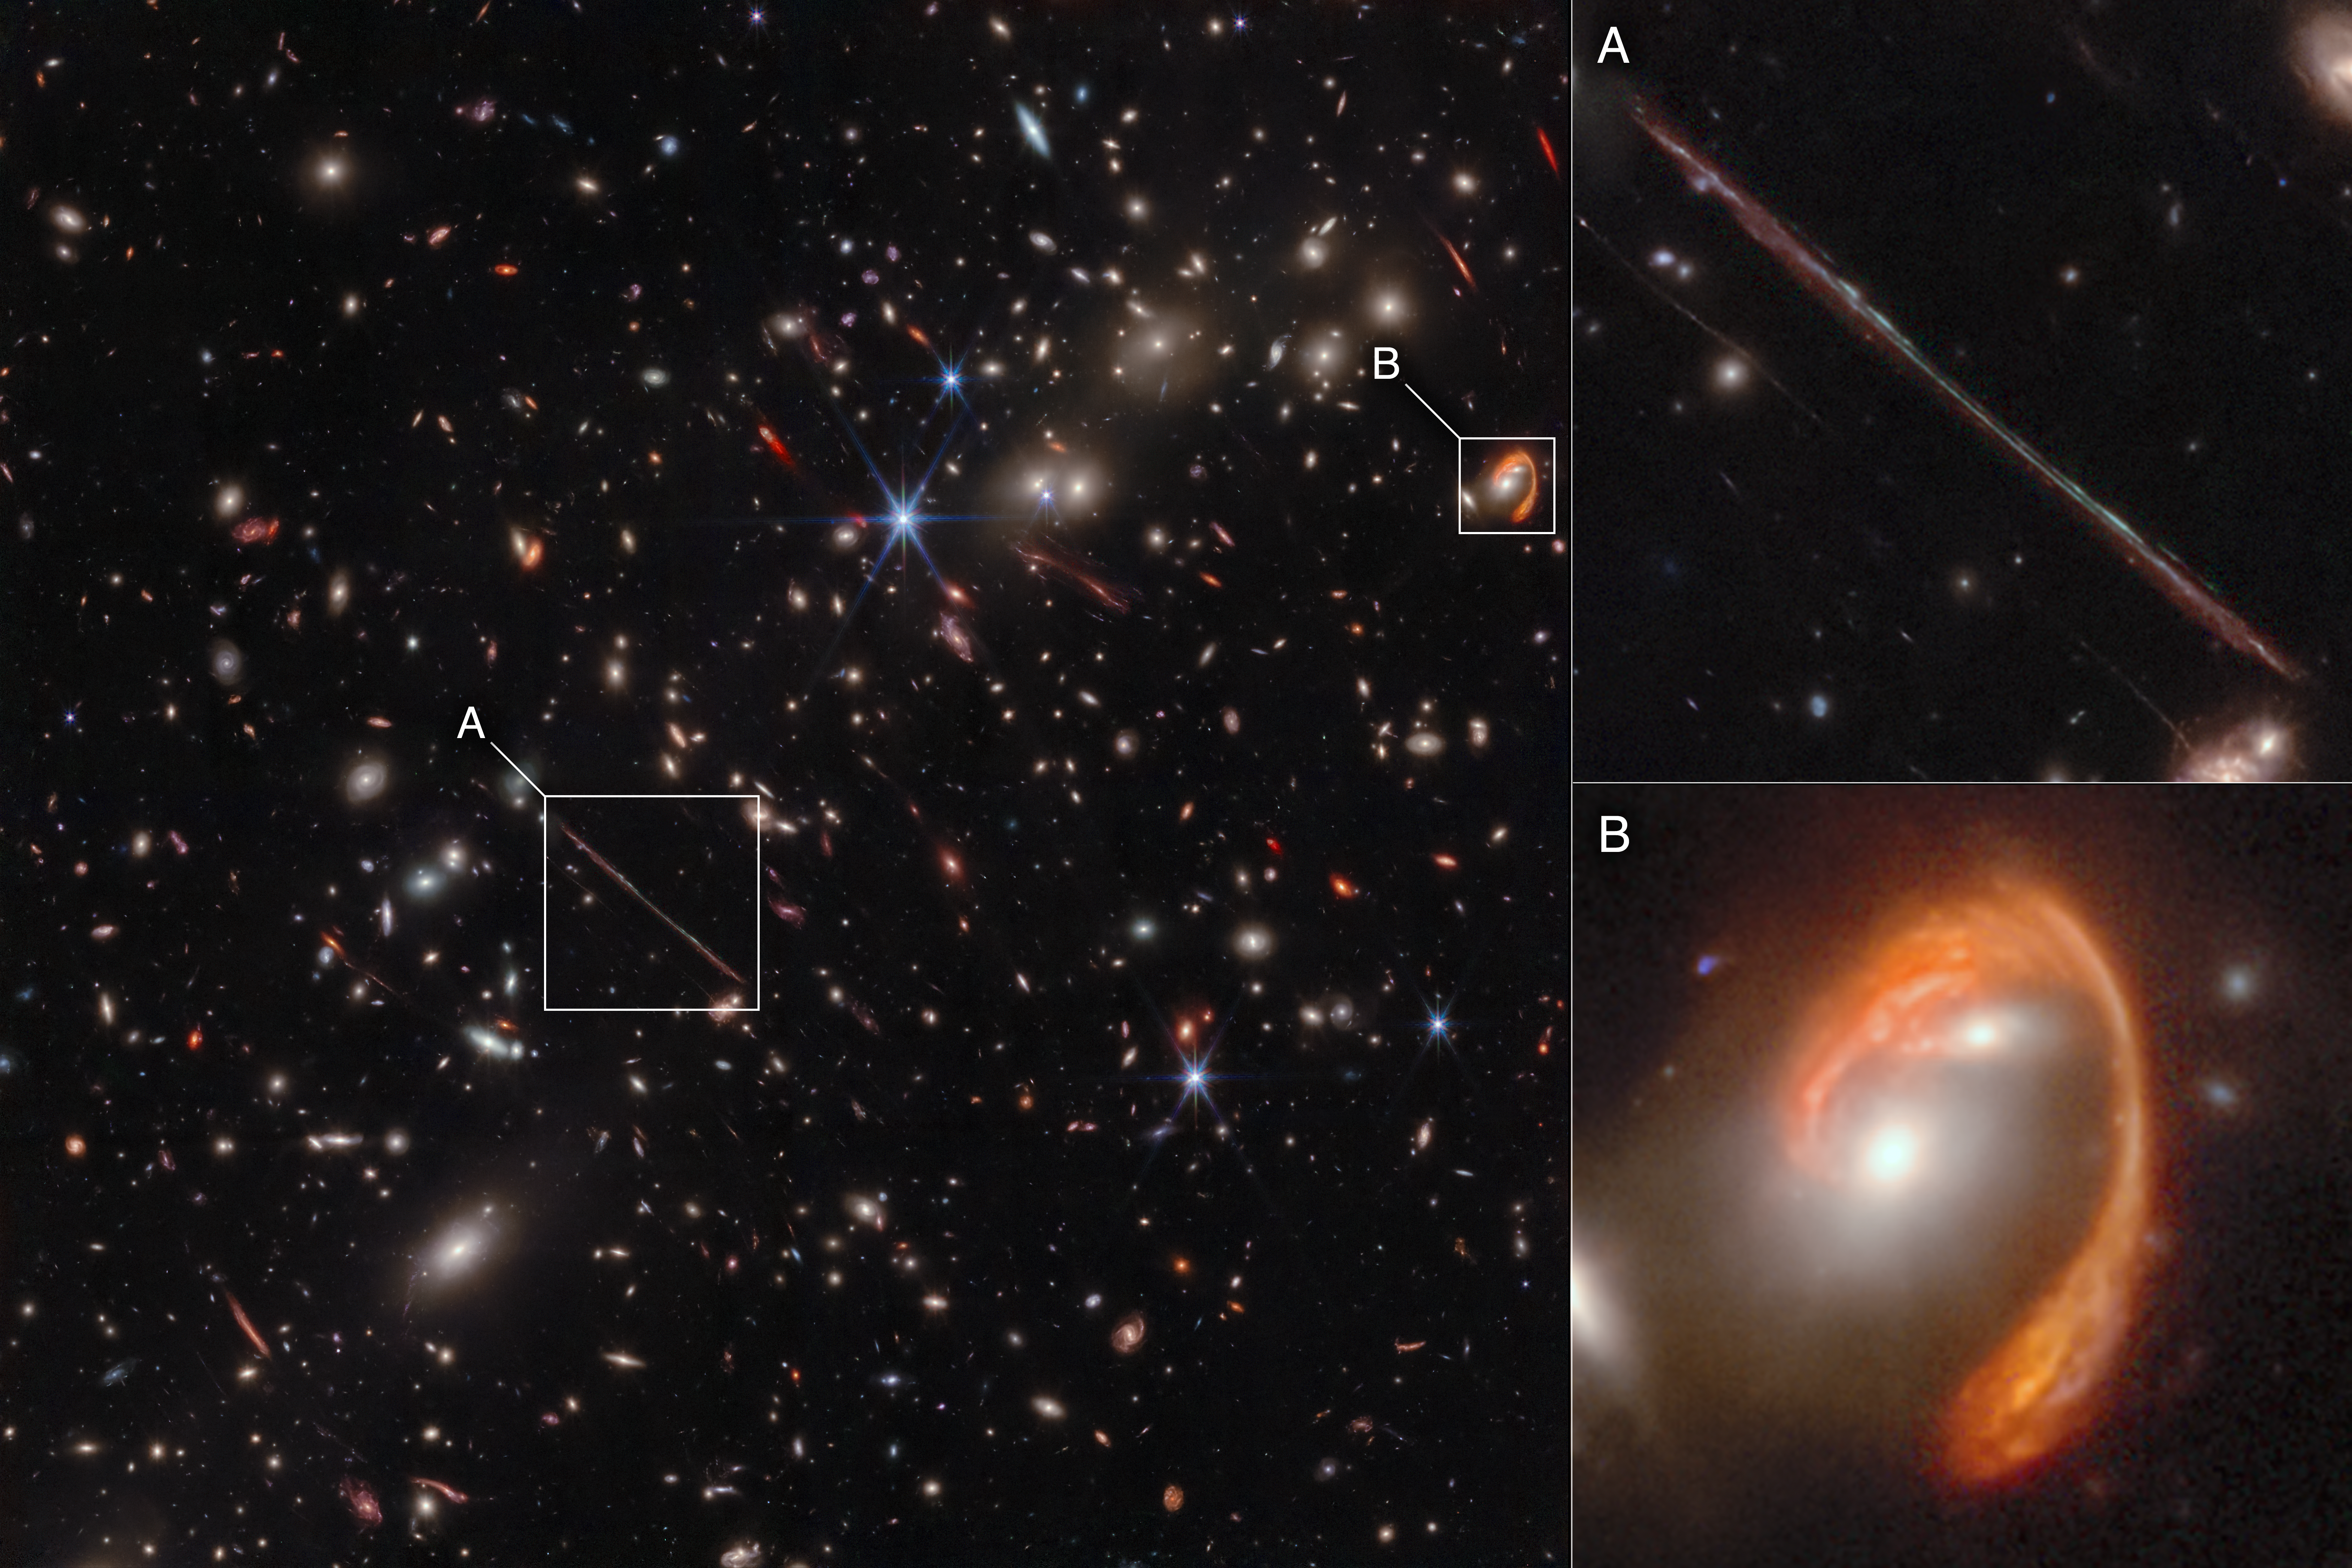

Webb spotlights gravitational arcs in ‘El Gordo’ galaxy cluster (NIRCam image)

Webb’s infrared image of the galaxy cluster El Gordo (“the Fat One”) reveals hundreds of galaxies, some never before seen at this level of detail. El Gordo acts as a gravitational lens, distorting and magnifying the light from distant background galaxies. Two of the most prominent features in the image include the Thin One, highlighted in box A, and the Fishhook, a red swoosh highlighted in box B. Both are lensed background galaxies. The insets at right show zoomed-in views of both objects.

Credit: NASA, ESA, CSA, J. Diego (Instituto de Física de Cantabria), B. Frye (University of Arizona), P. Kamieneski (Arizona State University), T. Carleton (Arizona State University), R. Windhorst (Arizona State Univeristy), A. Pagan (STScI), J. Summers (Arizona State University), J. D’Silva (University of Western Australia), A. Koekemoer (STScI), A. Robotham (University of Western Australia)